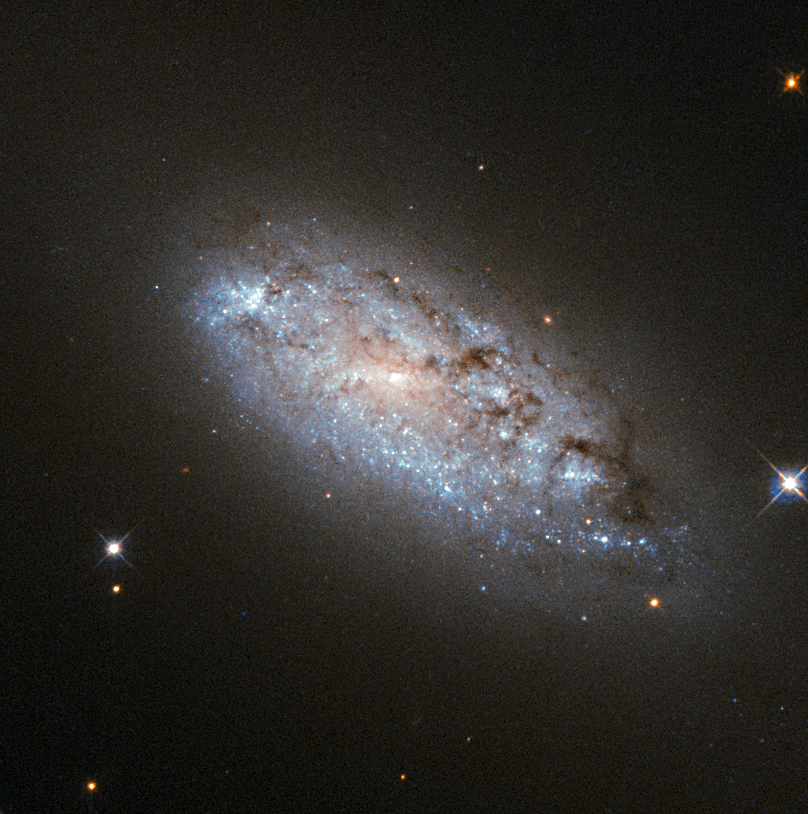

The peculiar asymmetry of NGC 949

This image provides the clearest ever view of galaxy NGC 949, which lies over 30 million light-years away in the constellation of Triangulum. The galaxy has an unusual shape, made more obscure due to its inclination. From our point of view, it is difficult to discern exactly what type of galaxy NGC 949 is, but it is certainly a disc galaxy of some kind, most likely a spiral.

NGC 949 was first discovered by Sir William Herschel on 21 September 1786, using an 18.7-inch reflecting telescope. The galaxy was one of about 3000 objects Herschel catalogued as "nebulae" during an intense and systematic deep sky survey, the results of which eventually formed the bulk of the New General Catalogue (NGC).

Taken with Hubble’s Advanced Camera for Surveys (ACS), this new image shows extraordinary detail. This detail allows us to see a strange asymmetric alignment in the dark lanes of dust that snake across the galaxy. The top-right half of the galaxy appears considerably more marbled with dust in this image; a curious observation explained by stars tending to favour locations towards the centre of a galaxy, and dust preferring almost invariably to reside along the galactic plane.

When a galaxy is inclined as NGC 949 is, some regions — in this case the top-right — are tipped towards us and the light from the stars we see in these regions has had to travel through more dust. This causes the light to appear redder — the result of the same process that gives the sun’s light a red hue at dusk — or else disappear entirely, making the dust appear more prominent on that side of the galaxy.

In the part tipped away from us, the light from the stars has had to pass through much less dust to reach us, so it appears brighter, and the dust is much less prominent.

Were it possible to view NGC 949 from the opposite side, the apparent alignment of the dust would be reversed.

The scientific advantages of this effect were recently displayed in suitably stunning style in the M31 PHAT mosaic, which allowed astronomers to produce a partial three-dimensional dust map of M31 four times clearer than any previously attempted.

Credit: ESA/Hubble & NASA